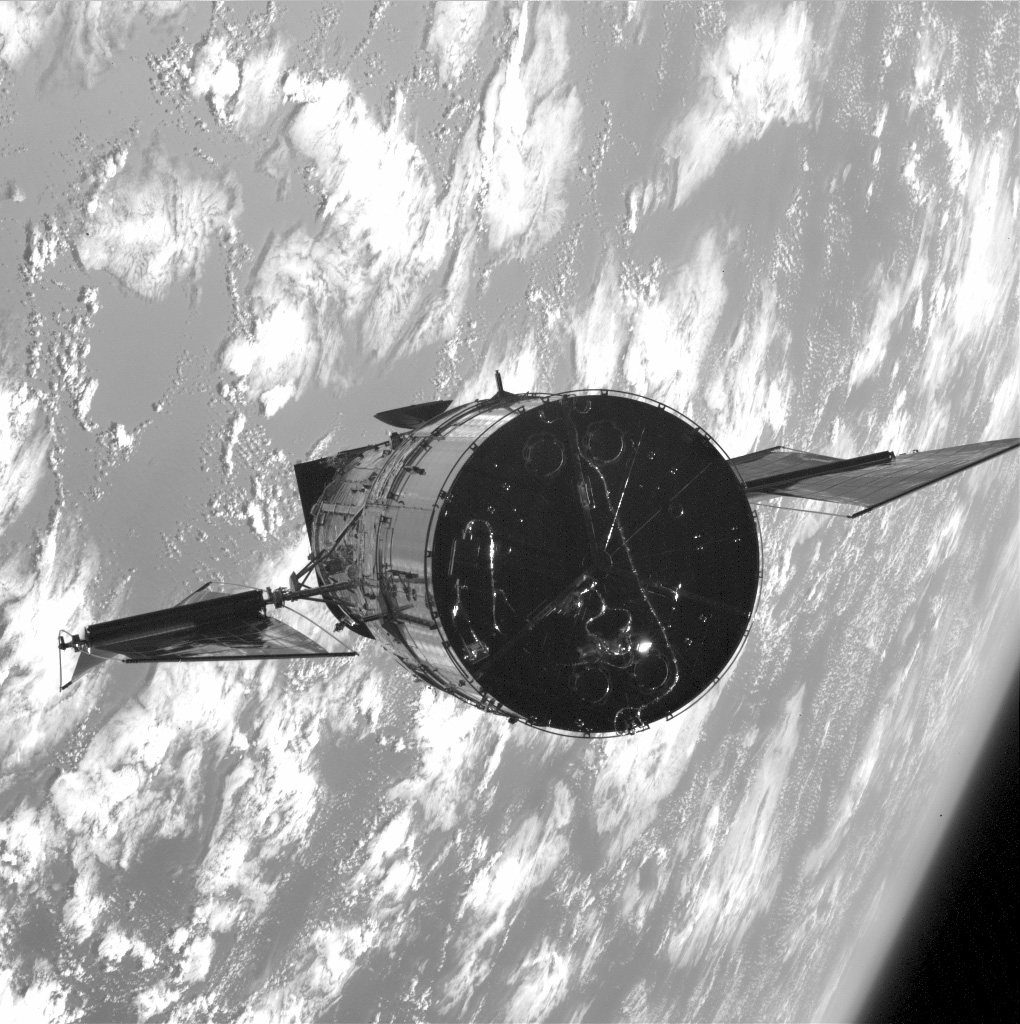

The old solar arrays

This is an image of the Hubble Space Telescope's (HST) old solar arrays. A new set was installed in this service mission (SM1).

Credit: NASA/ESA